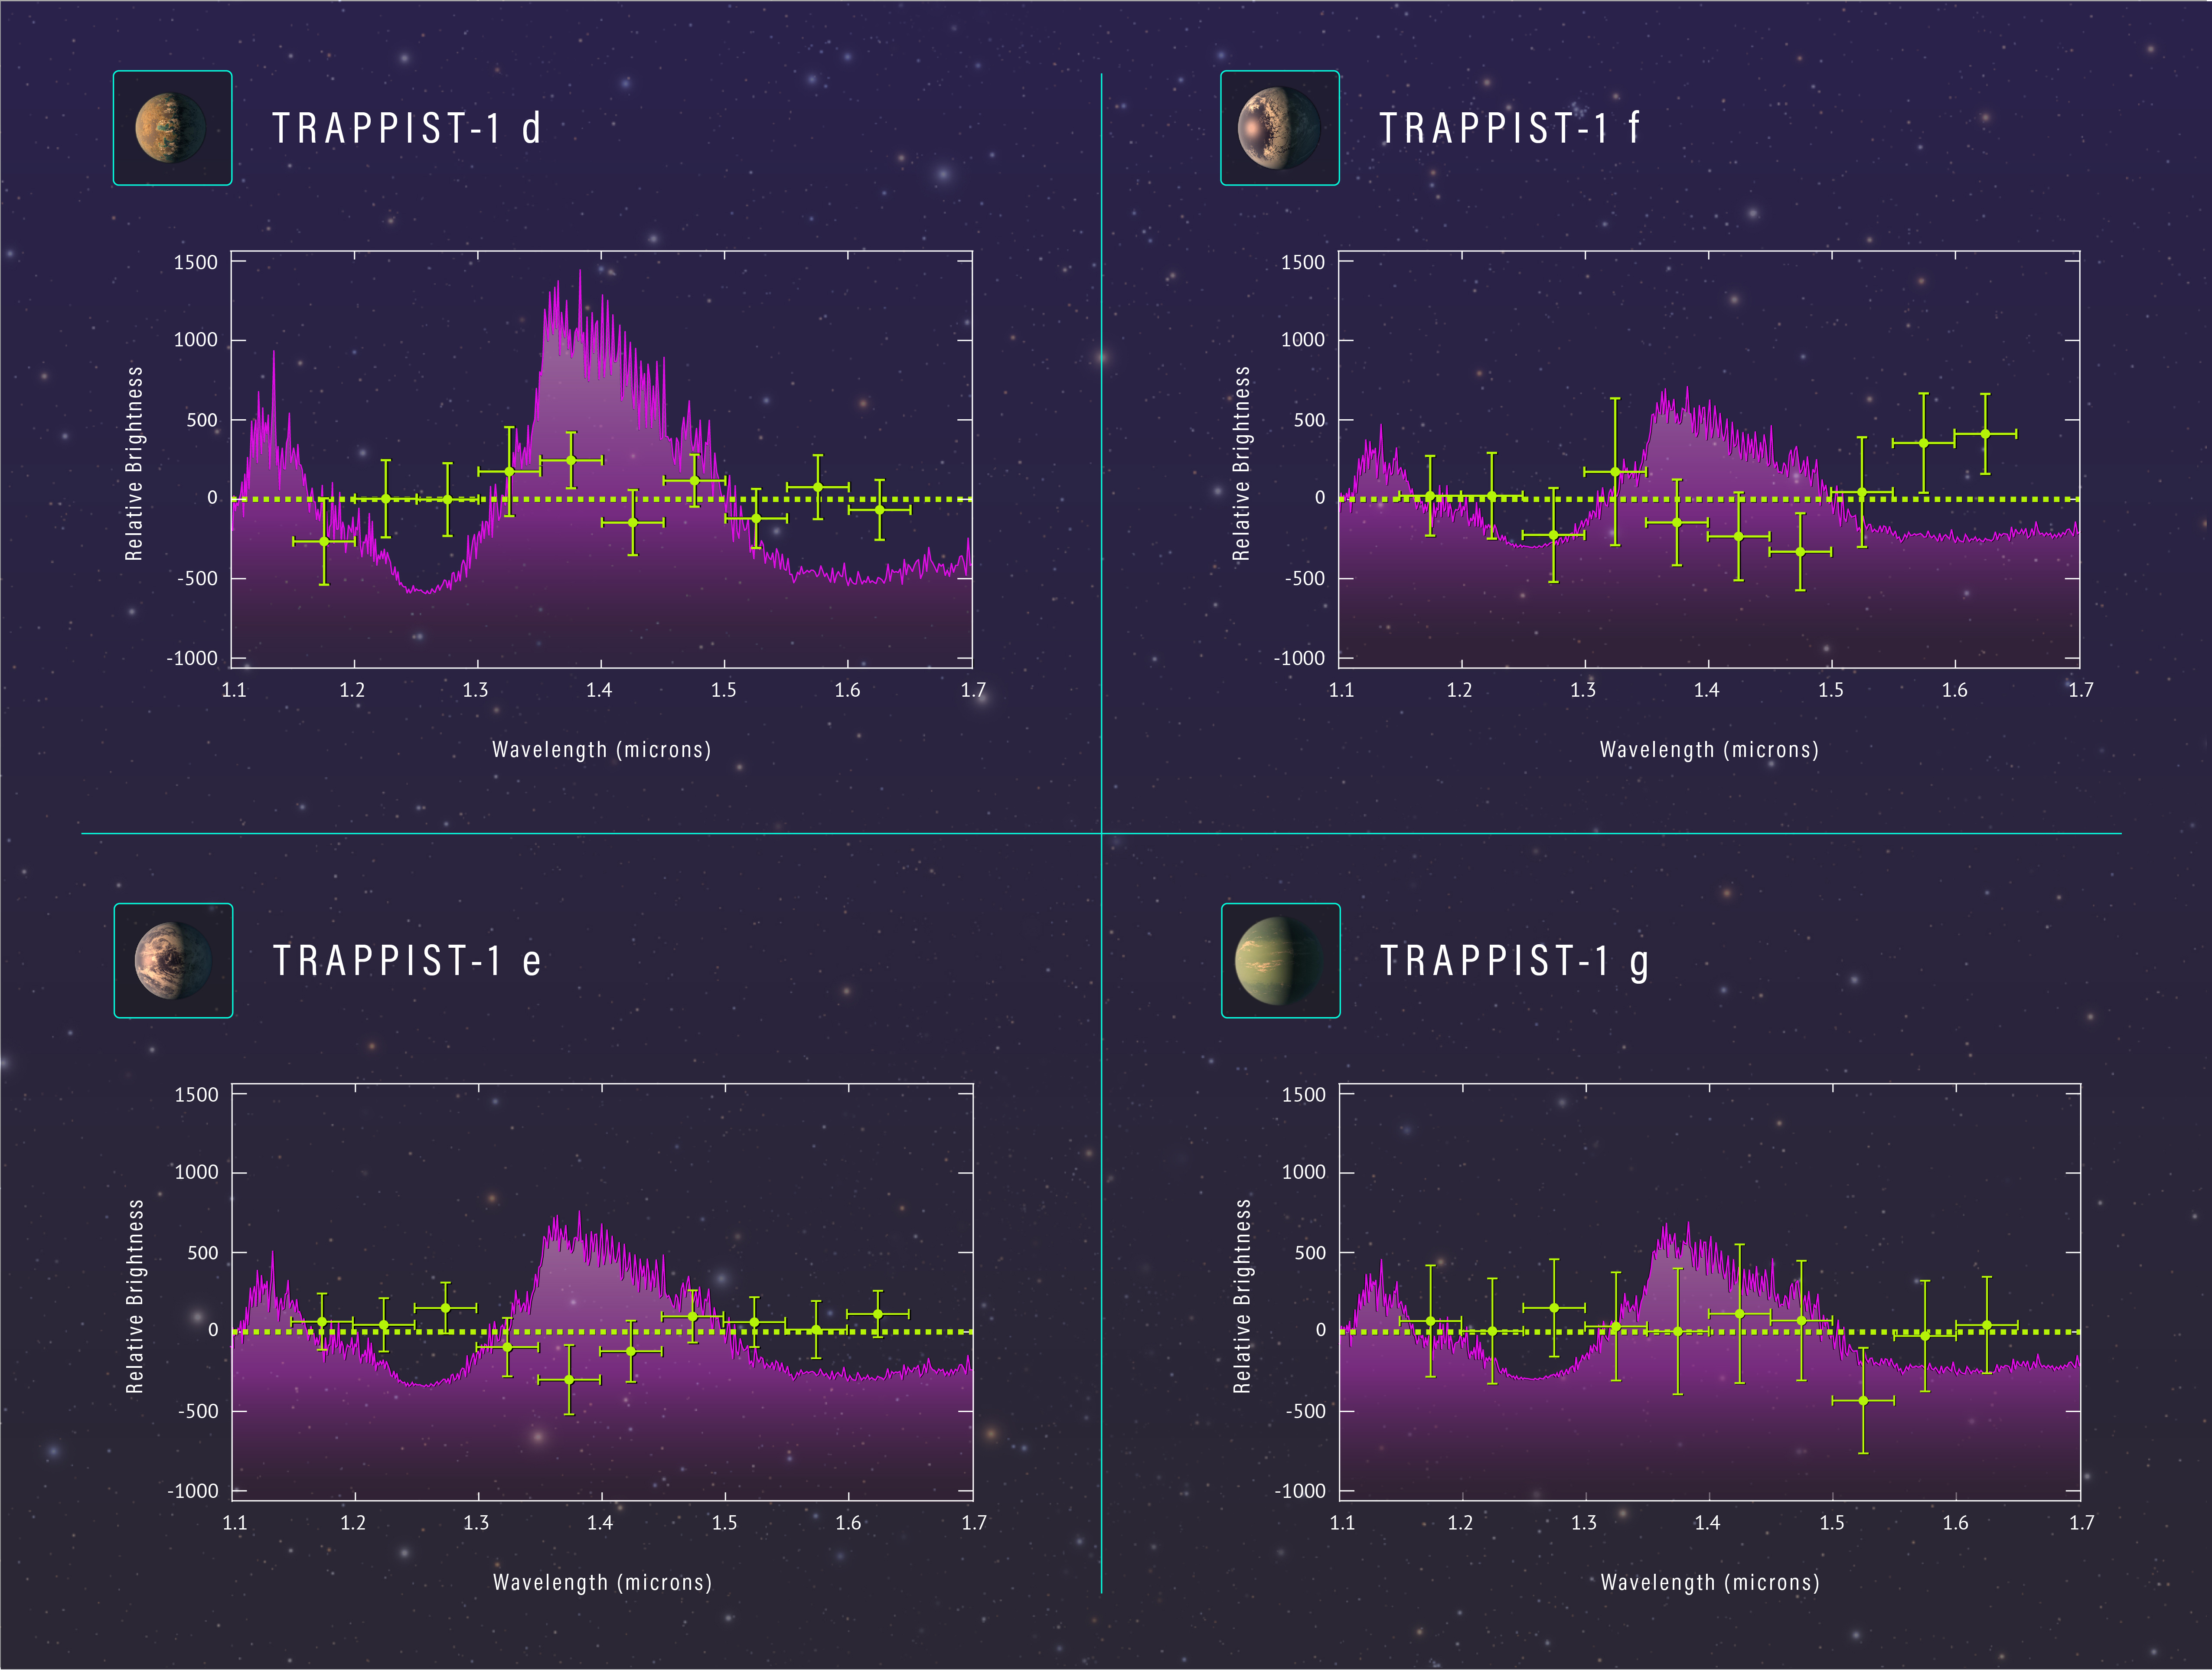

Spectra of planets in TRAPPIST-1 system

These spectra show the chemical makeup of the atmospheres of four of the Earth-sized planets orbiting within or near the habitable zone of the star TRAPPIST-1.

To obtain the spectra, astronomers used the NASA/ESA Hubble Space Telescope to collect light from TRAPPIST-1 passing through the exoplanets’ atmospheres as the exoplanets crossed in front of the star.

The purple curves show the predicted signatures of gases such as water and methane that absorb certain wavelengths of light. These gases would be found in a puffy hydrogen-dominated atmosphere similar to those of gaseous planets such as Neptune. The Hubble results, indicated by the green crosses, reveal no evidence of an extended atmosphere in three of the exoplanets (TRAPPIST-1d, f, and e). Additional observations are needed to rule out a hydrogen-dominated atmosphere for the fourth planet (TRAPPIST-1g).

The evidence indicates that the atmospheres are more compact than could be measured by the Hubble observations.

Credit: NASA, ESA and Z. Levy (STScI)